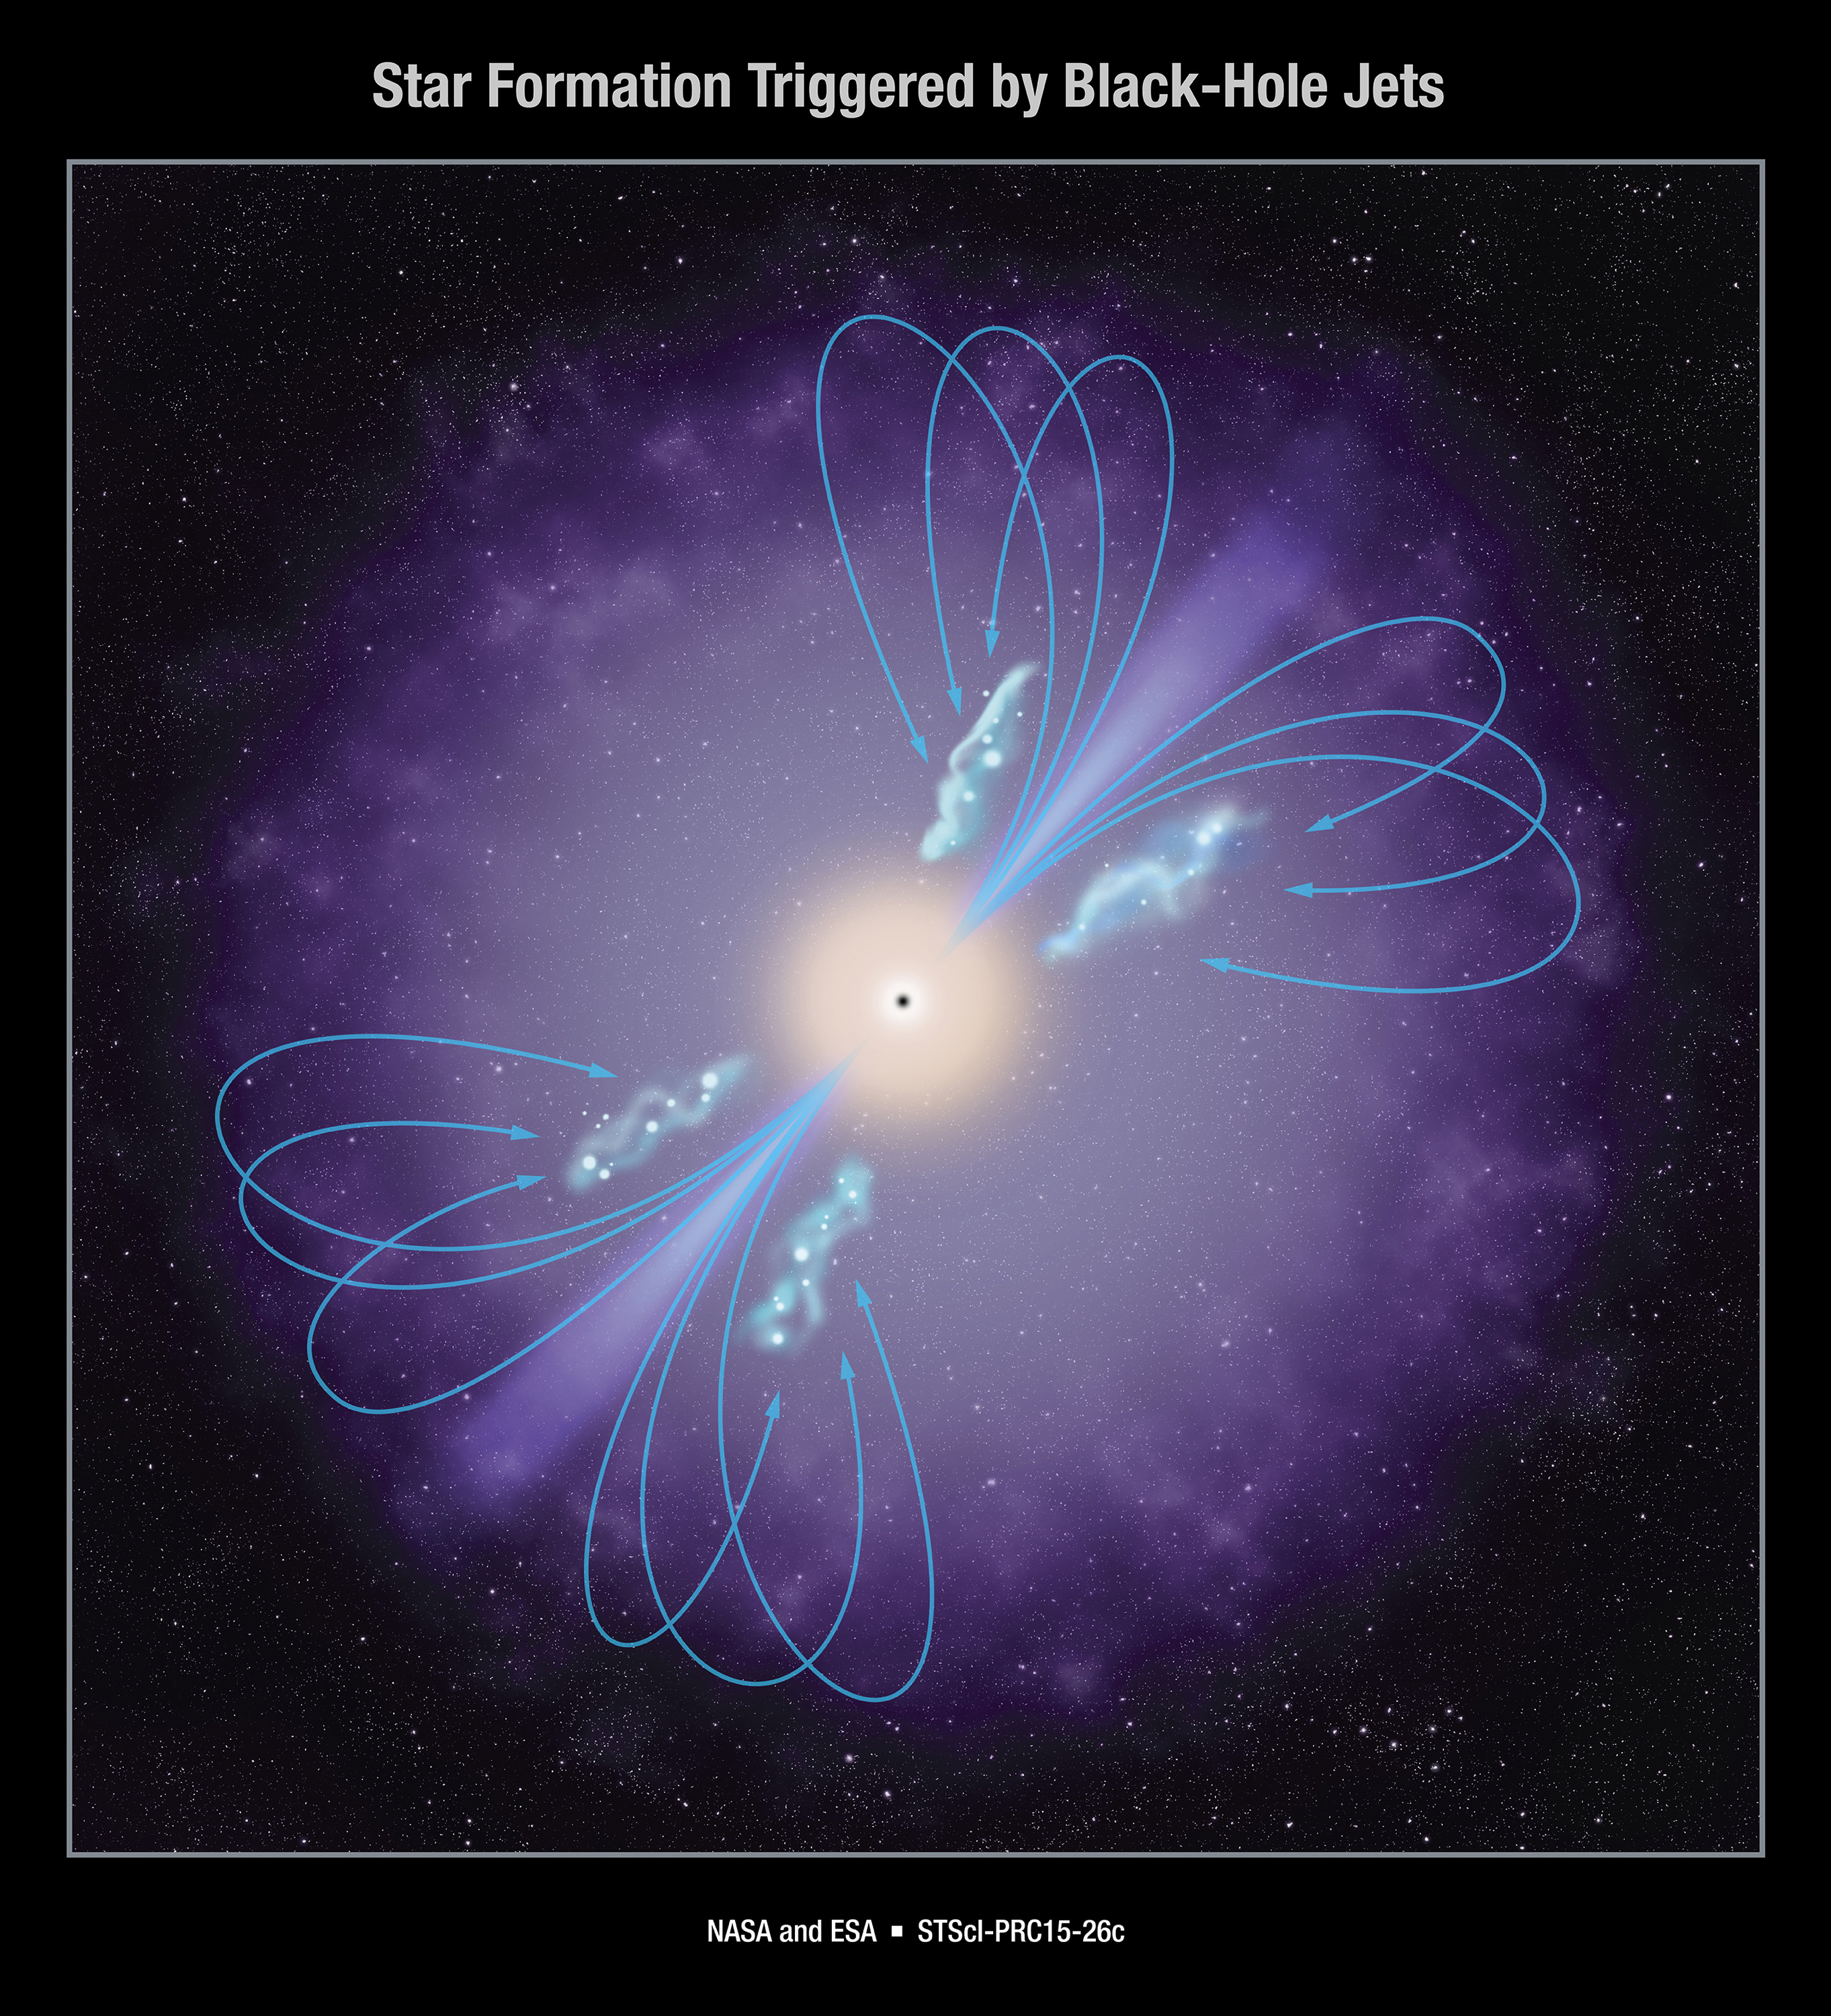

Star Formation Triggered by Black-Hole Jets

This artist's rendering shows a central black hole interacting with gas in the galaxy's halo to create a self-regulating cycle. In this cycle, jets shooting out of the galaxy's center heat a halo of surrounding gas, controlling the rate at which the gas cools and falls into the galaxy to form stars.

Credit: NASA, ESA, and P. Jeffries (STScI)